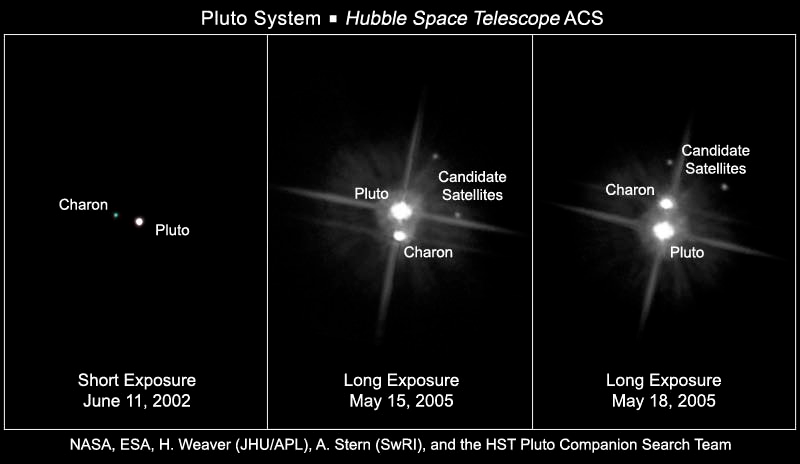

Hubble views the Pluto system

These Hubble Space Telescope images, taken by the Advanced Camera for Surveys, reveal Pluto, its large moon Charon, and the planet's two new putative satellites. In the short-exposure image [left], taken June 11, 2002, the candidate moons cannot be seen. They do, however, appear in the middle and right-hand images. Longer exposure times were used to take these images. Pluto and Charon are overexposed in these images, causing the bright streaks or "blooms" that emerge vertically from them. The candidate moons are not overexposed because they are thousands of times less bright than Pluto and Charon. In these unprocessed images, various optical artifacts of the Advanced Camera for Surveys system are visible, such as the radial spokes of light caused by the telescope's optics. The enhanced-color images of Pluto and Charon were constructed by combining images taken in filters near 475 nanometers (blue) and 555 nanometers (green-yellow). The images of the new satellites were taken in a single filter centered near 606 nanometers (yellow), so no colour information is available for them.

Credit: NASA, ESA, H. Weaver (JHU/APL), A. Stern (SwRI), and the Hubble Space Telescope Pluto Companion Search Team